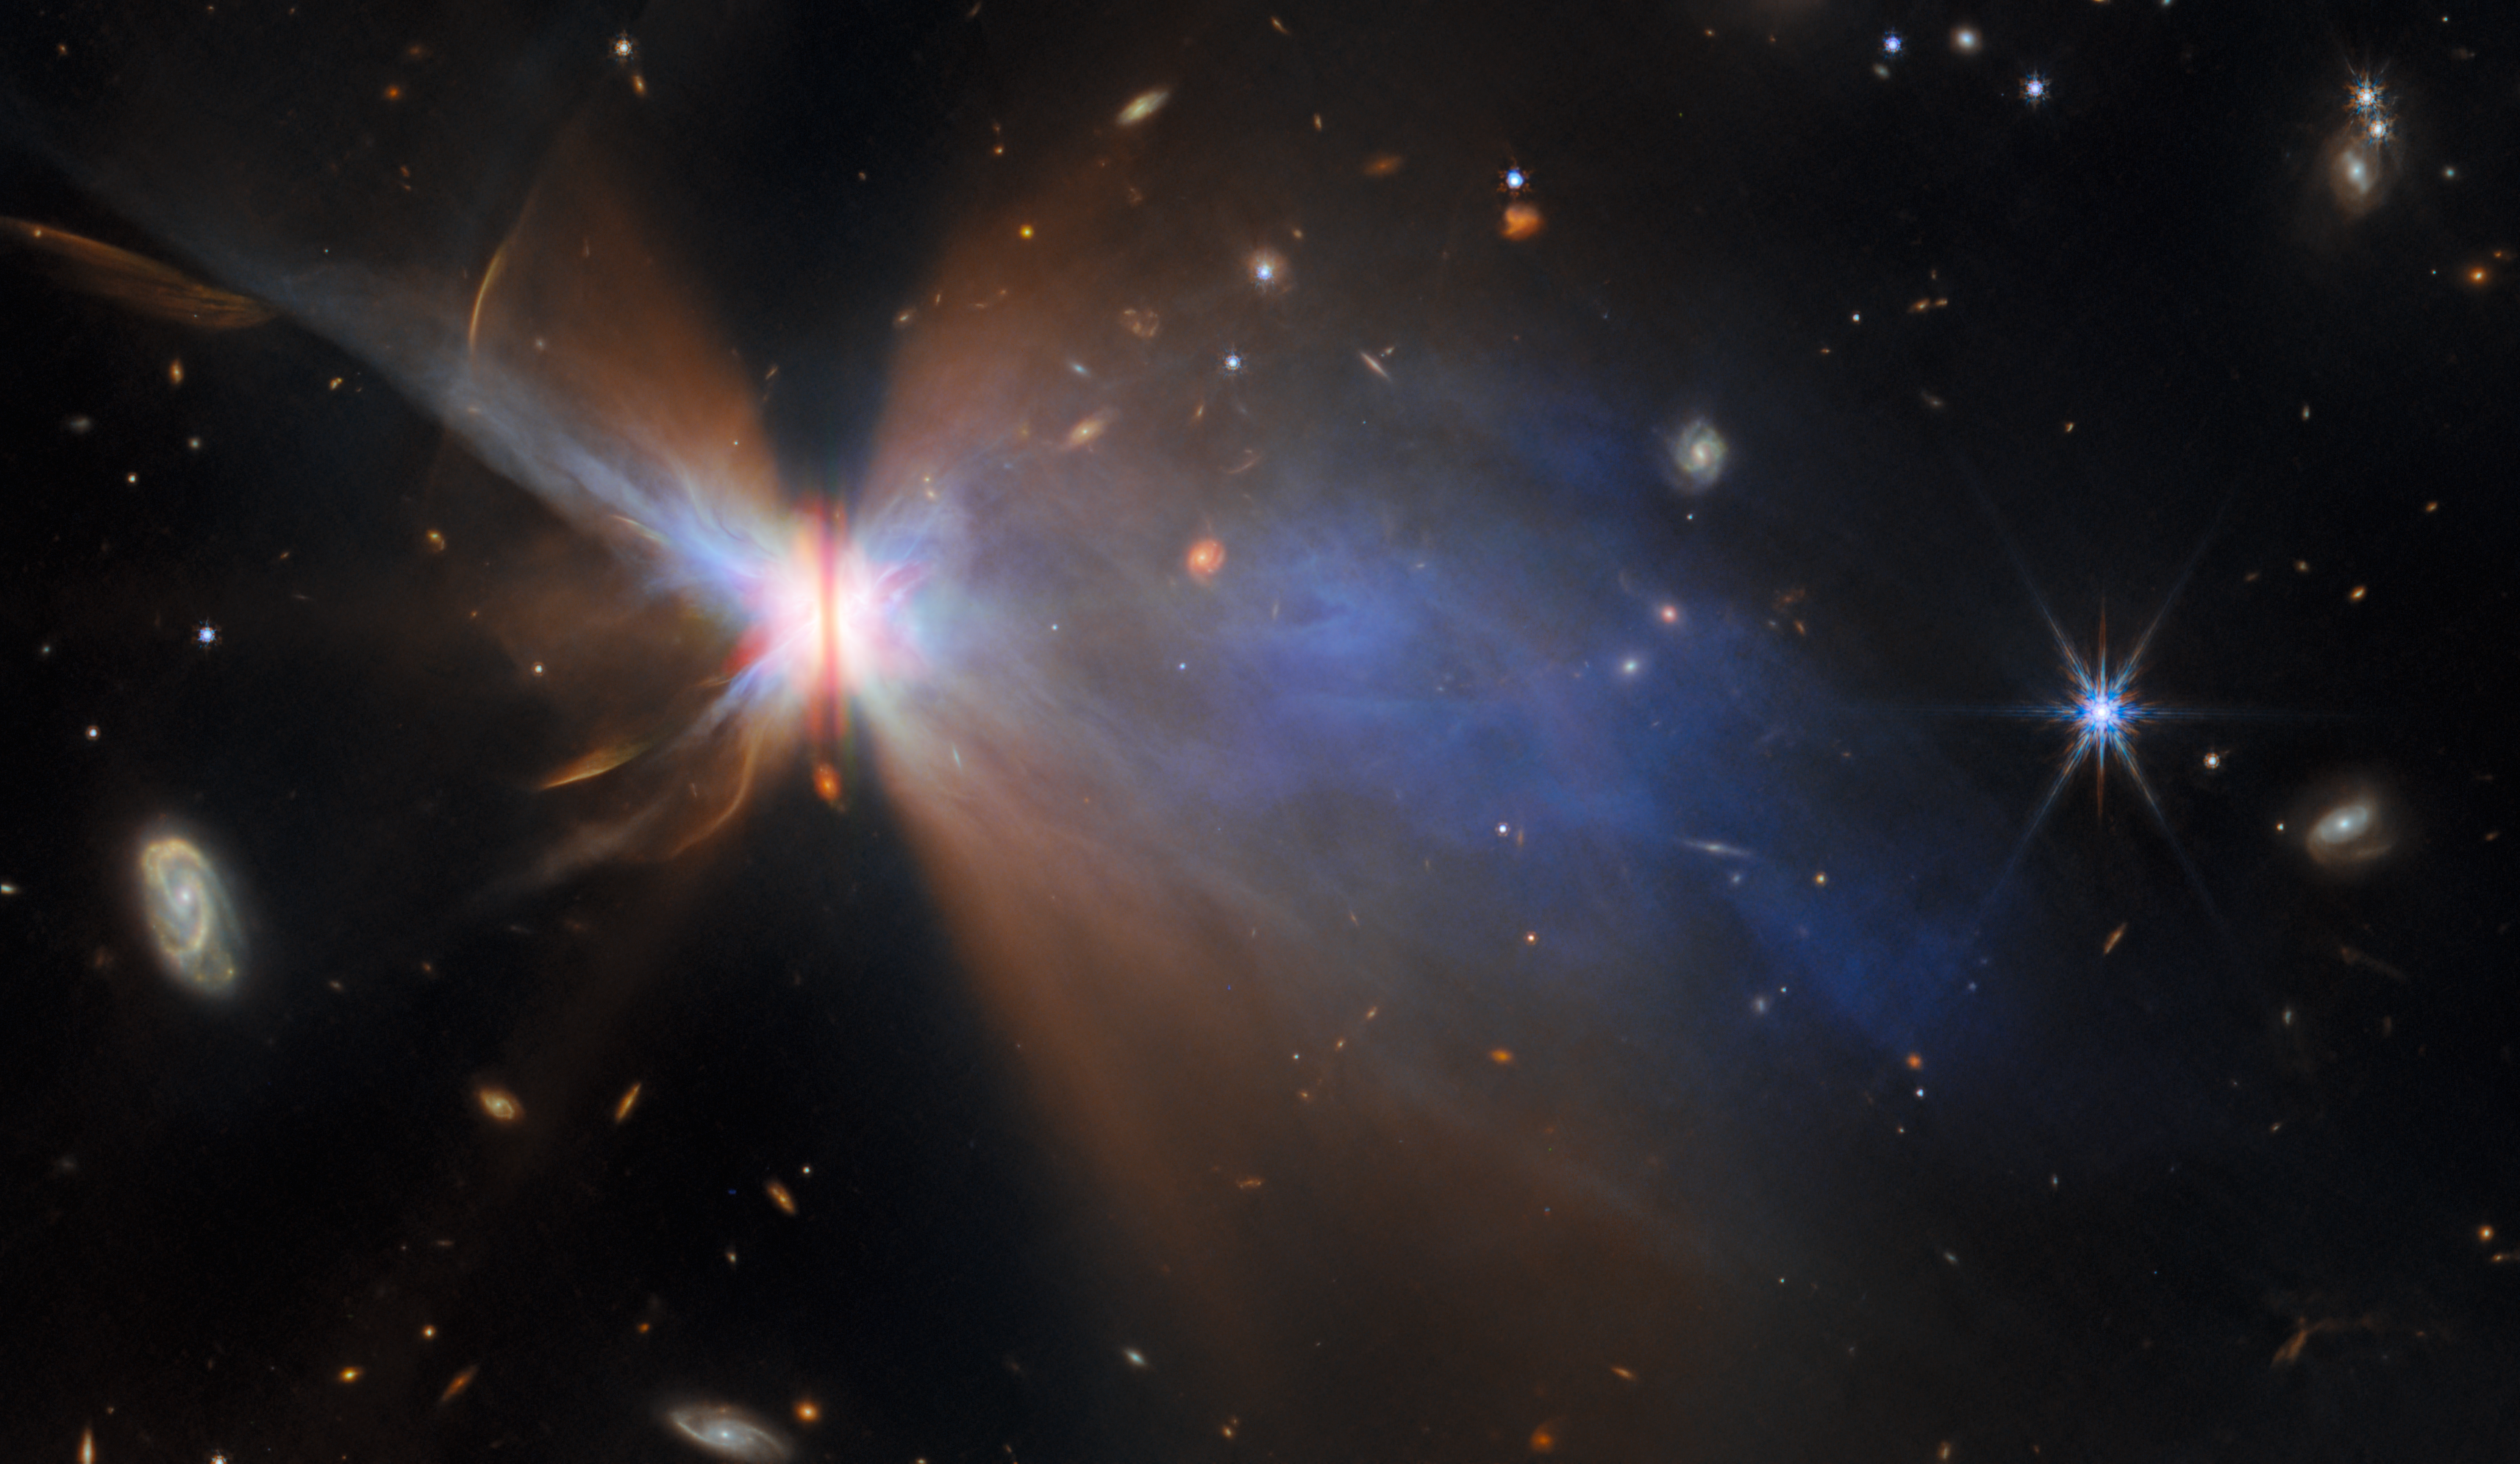

Dusty wisps round a dusty disc

For this new Picture of the Month feature, the NASA/ESA/CSA James Webb Space Telescope has provided a fantastic new view of IRAS 04302+2247, a planet-forming disc located about 525 light-years away in a dark cloud within the Taurus star-forming region. With Webb, researchers can study the properties and growth of dust grains within protoplanetary discs like this one, shedding light on the earliest stages of planet formation.

In stellar nurseries across the galaxy, baby stars are forming in giant clouds of cold gas. As young stars grow, the gas surrounding them collects in narrow, dusty protoplanetary discs. This sets the scene for the formation of planets, and observations of distant protoplanetary discs can help researchers understand what took place roughly 4.5 billion years ago in our own Solar System, when the Sun, Earth, and the other planets formed.

IRAS 04302+2247, or IRAS 04302 for short, is a beautiful example of a protostar - a young star that is still gathering mass from its environment - surrounded by a protoplanetary disc in which baby planets might be forming. Webb is able to measure the disc at 65 billion kilometres across - several times the diameter of our Solar System. From Webb’s vantage point, IRAS 04302’s disc is oriented edge-on, so we see it as a narrow, dark line of dusty gas that blocks the light from the budding protostar at its centre. This dusty gas is fuel for planet formation, providing an environment within which young planets can bulk up and pack on mass.

When seen face-on, protoplanetary discs can have a variety of structures like rings, gaps and spirals. These structures can be signs of baby planets that are burrowing through the dusty disc, or they can point to phenomena unrelated to planets, like gravitational instabilities or regions where dust grains are trapped. The edge-on view of IRAS 04302’s disc shows instead the vertical structure, including how thick the dusty disk is. Dust grains migrate to the midplane of the disc, settle there and form a thin, dense layer that is conducive to planet formation; the thickness of the disc is a measure of how efficient this process has been.

The dense streak of dusty gas that runs vertically across this image cocoons IRAS 04302, blotting out its bright light such that Webb can more easily image the delicate structures around it. As a result, we’re treated to the sight of two gauzy nebulae on either side of the disc. These are reflection nebulae, illuminated by light from the central protostar reflecting off of the nebular material. Given the appearance of the two reflection nebulae, IRAS 04302 has been nicknamed the “Butterfly Star”.

This view of IRAS 04302 features observations from Webb's Near-InfraRed Camera (NIRCam) and its Mid-InfraRed Instrument (MIRI), combined with optical data from the NASA/ESA Hubble Space Telescope. Together, these powerful facilities paint a fascinating multiwavelength portrait of a planetary birthplace. Webb reveals the distribution of tiny dust grains as well as the reflection of near-infrared light off of dusty material that extends a large distance from the disc, while Hubble focuses on the dust lane as well as clumps and streaks surrounding the dust that suggest the star is still collecting mass from its surroundings as well as shooting out jets and outflows.

The Webb observations of IRAS 04302 were taken as part of the Webb GO programme #2562 (PI F. Ménard, K. Stapelfeldt). This programme investigates four protoplanetary discs that are oriented edge-on from our point of view, aiming to understand how dust evolves within these discs. The growth of dust grains in protoplanetary discs is believed to be an important step toward planet formation.

Credit: ESA/Webb, NASA & CSA, M. Villenave et al.